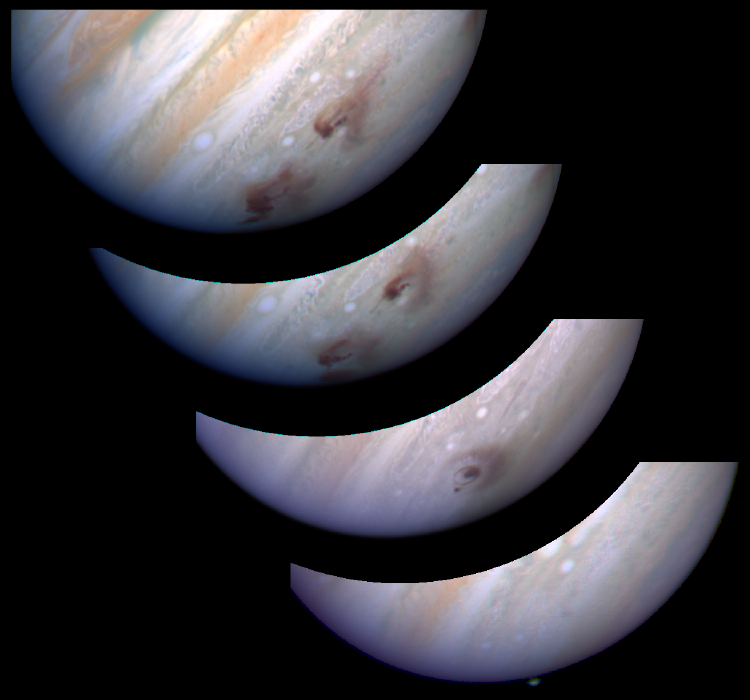

Jupiter G Impact Evolution

This mosaic of WFPC-2 images shows the evolution of the G impact site on Jupiter. For a detailed description of the four images, please click the Caption link below.

Credit: R. Evans, J. Trauger, H. Hammel and the HST Comet Science Team andNASA/ESA